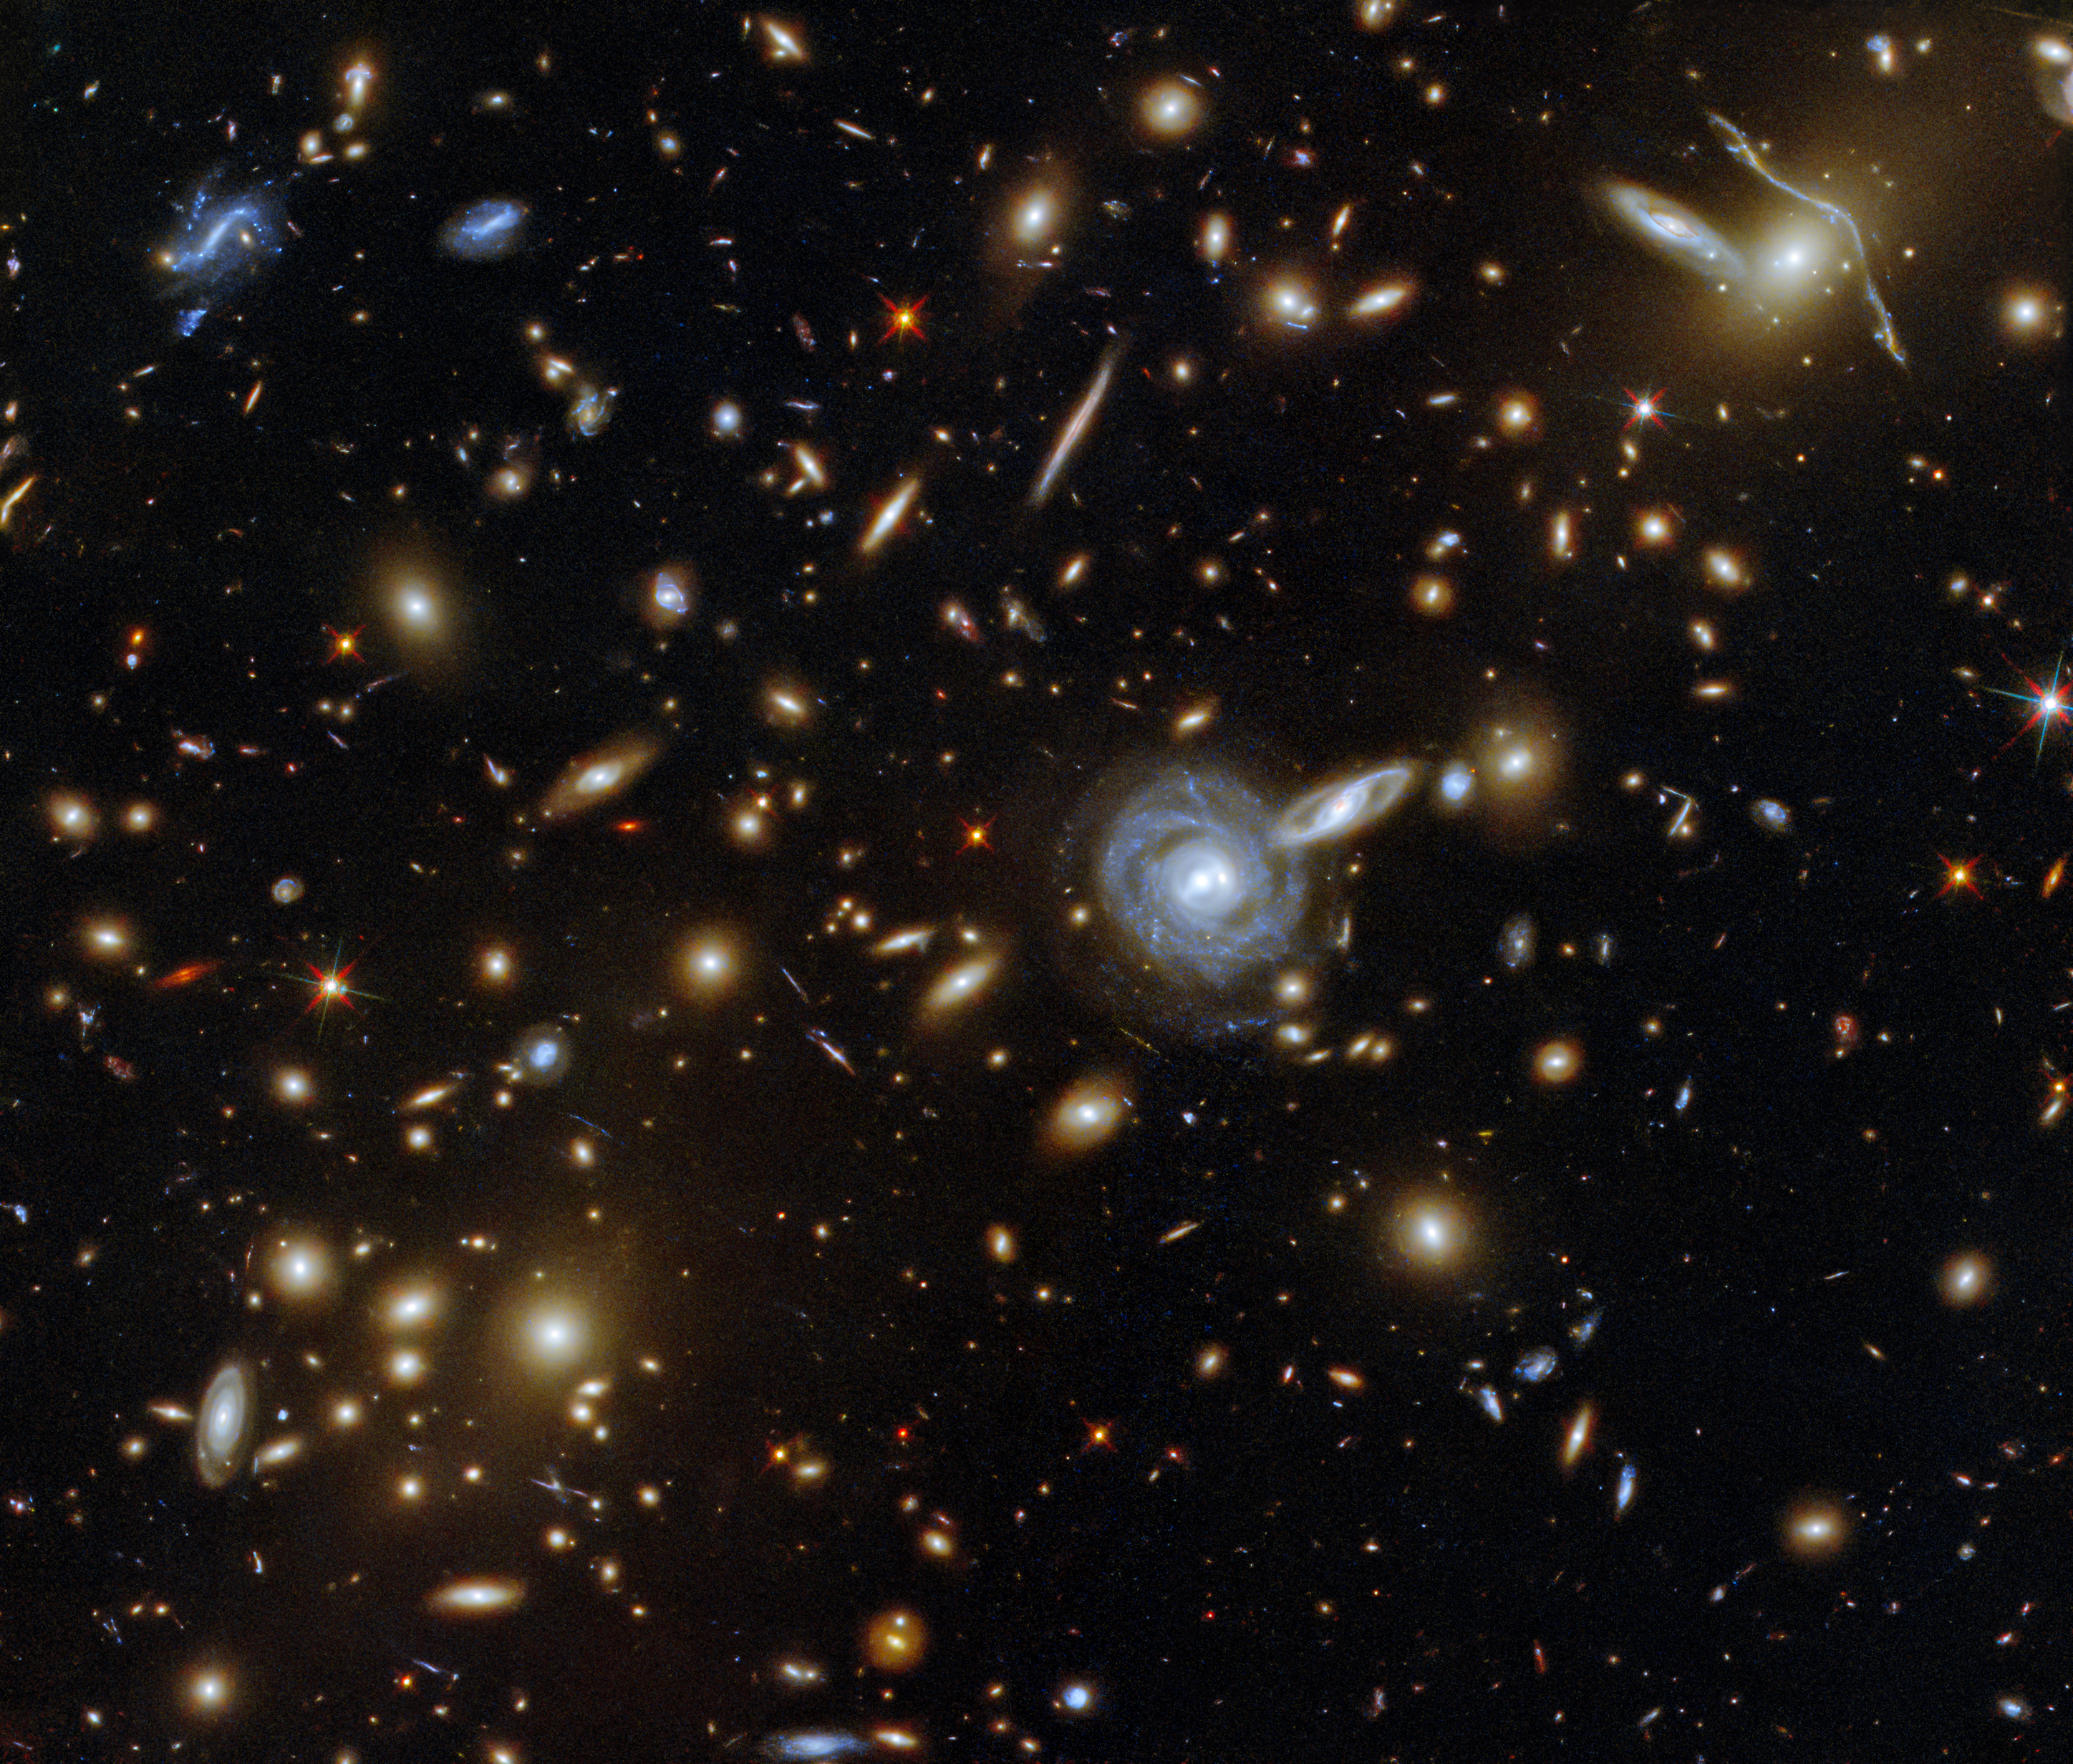

A Menagerie of Galaxies

This packed ESA/Hubble Picture of the Week showcases the galaxy cluster ACO S 295, as well as a jostling crowd of background galaxies and foreground stars. Galaxies of all shapes and sizes populate this image, ranging from stately spirals to fuzzy ellipticals. As well as a range of sizes, this galactic menagerie boasts a range of orientations, with spiral galaxies such as the one at the centre of this image appearing almost face on, and some edge-on spiral galaxies visible only as thin slivers of light.

The cluster dominates the centre of this image, both visually and physically. The huge mass of the galaxy cluster has gravitationally lensed the background galaxies, distorting and smearing their shapes. As well as providing astronomers with a natural magnifying glass with which to study distant galaxies, gravitational lensing has subtly framed the centre of this image, producing a visually striking scene.

Credit: ESA/Hubble & NASA, F. Pacaud, D. Coe